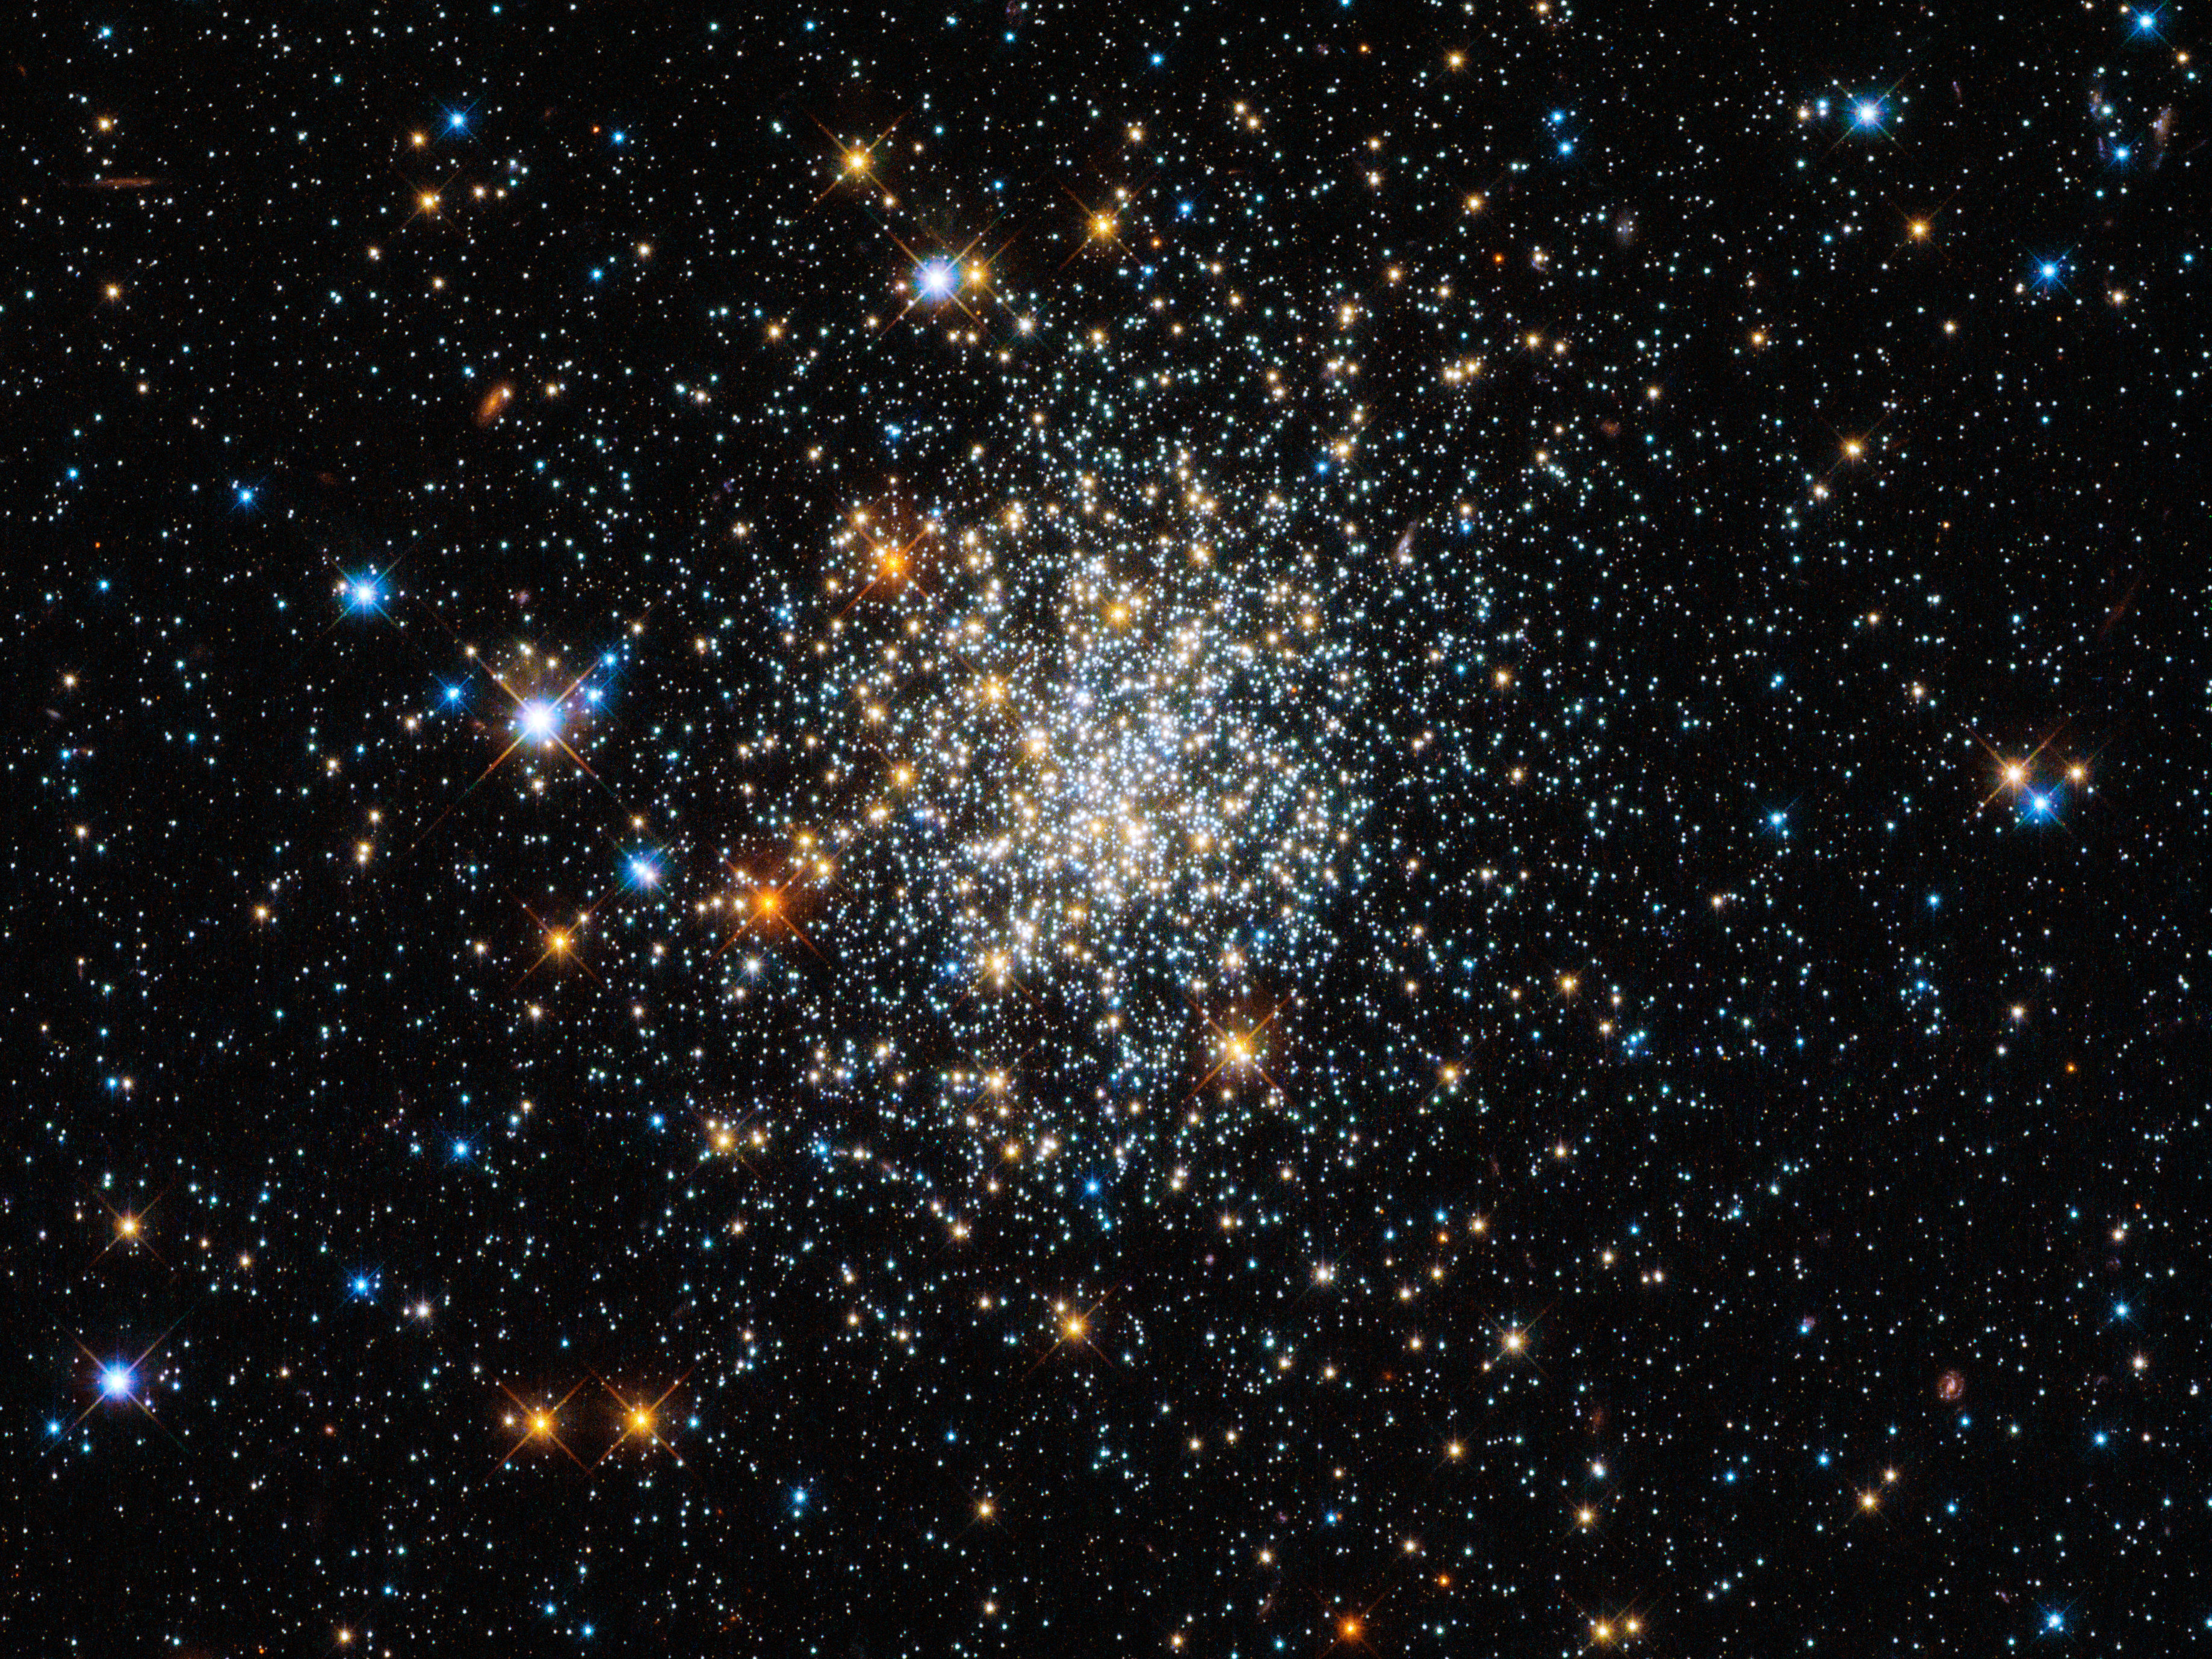

Appearances can be deceptive

Globular clusters are roughly spherical collections of extremely old stars, and around 150 of them are scattered around our galaxy. Hubble is one of the best telescopes for studying these, as its extremely high resolution lets astronomers see individual stars, even in the crowded core. The clusters all look very similar, and in Hubble’s images it can be quite hard to tell them apart – and they all look much like NGC 411, pictured here.

And yet appearances can be deceptive: NGC 411 is in fact not a globular cluster, and its stars are not old. It isn’t even in the Milky Way.

NGC 411 is classified as an open cluster. Less tightly bound than a globular cluster, the stars in open clusters tend to drift apart over time as they age, whereas globulars have survived for well over 10 billion years of galactic history. NGC 411 is a relative youngster — not much more than a tenth of this age. Far from being a relic of the early years of the Universe, the stars in NGC 411 are in fact a fraction of the age of the Sun.

The stars in NGC 411 are all roughly the same age, having formed in one go from one cloud of gas. But they are not all the same size. Hubble’s image shows a wide range of colours and brightnesses in the cluster’s stars. These tell astronomers many facts about the stars, including their mass, temperature and evolutionary phase. Blue stars, for instance, have higher surface temperatures than red ones.

The image is a composite produced from ultraviolet, visible and infrared observations made by Hubble’s Wide Field Camera 3. This filter set lets the telescope “see” colours slightly further beyond red and the violet ends of the spectrum.

Credit: ESA/Hubble & NASA